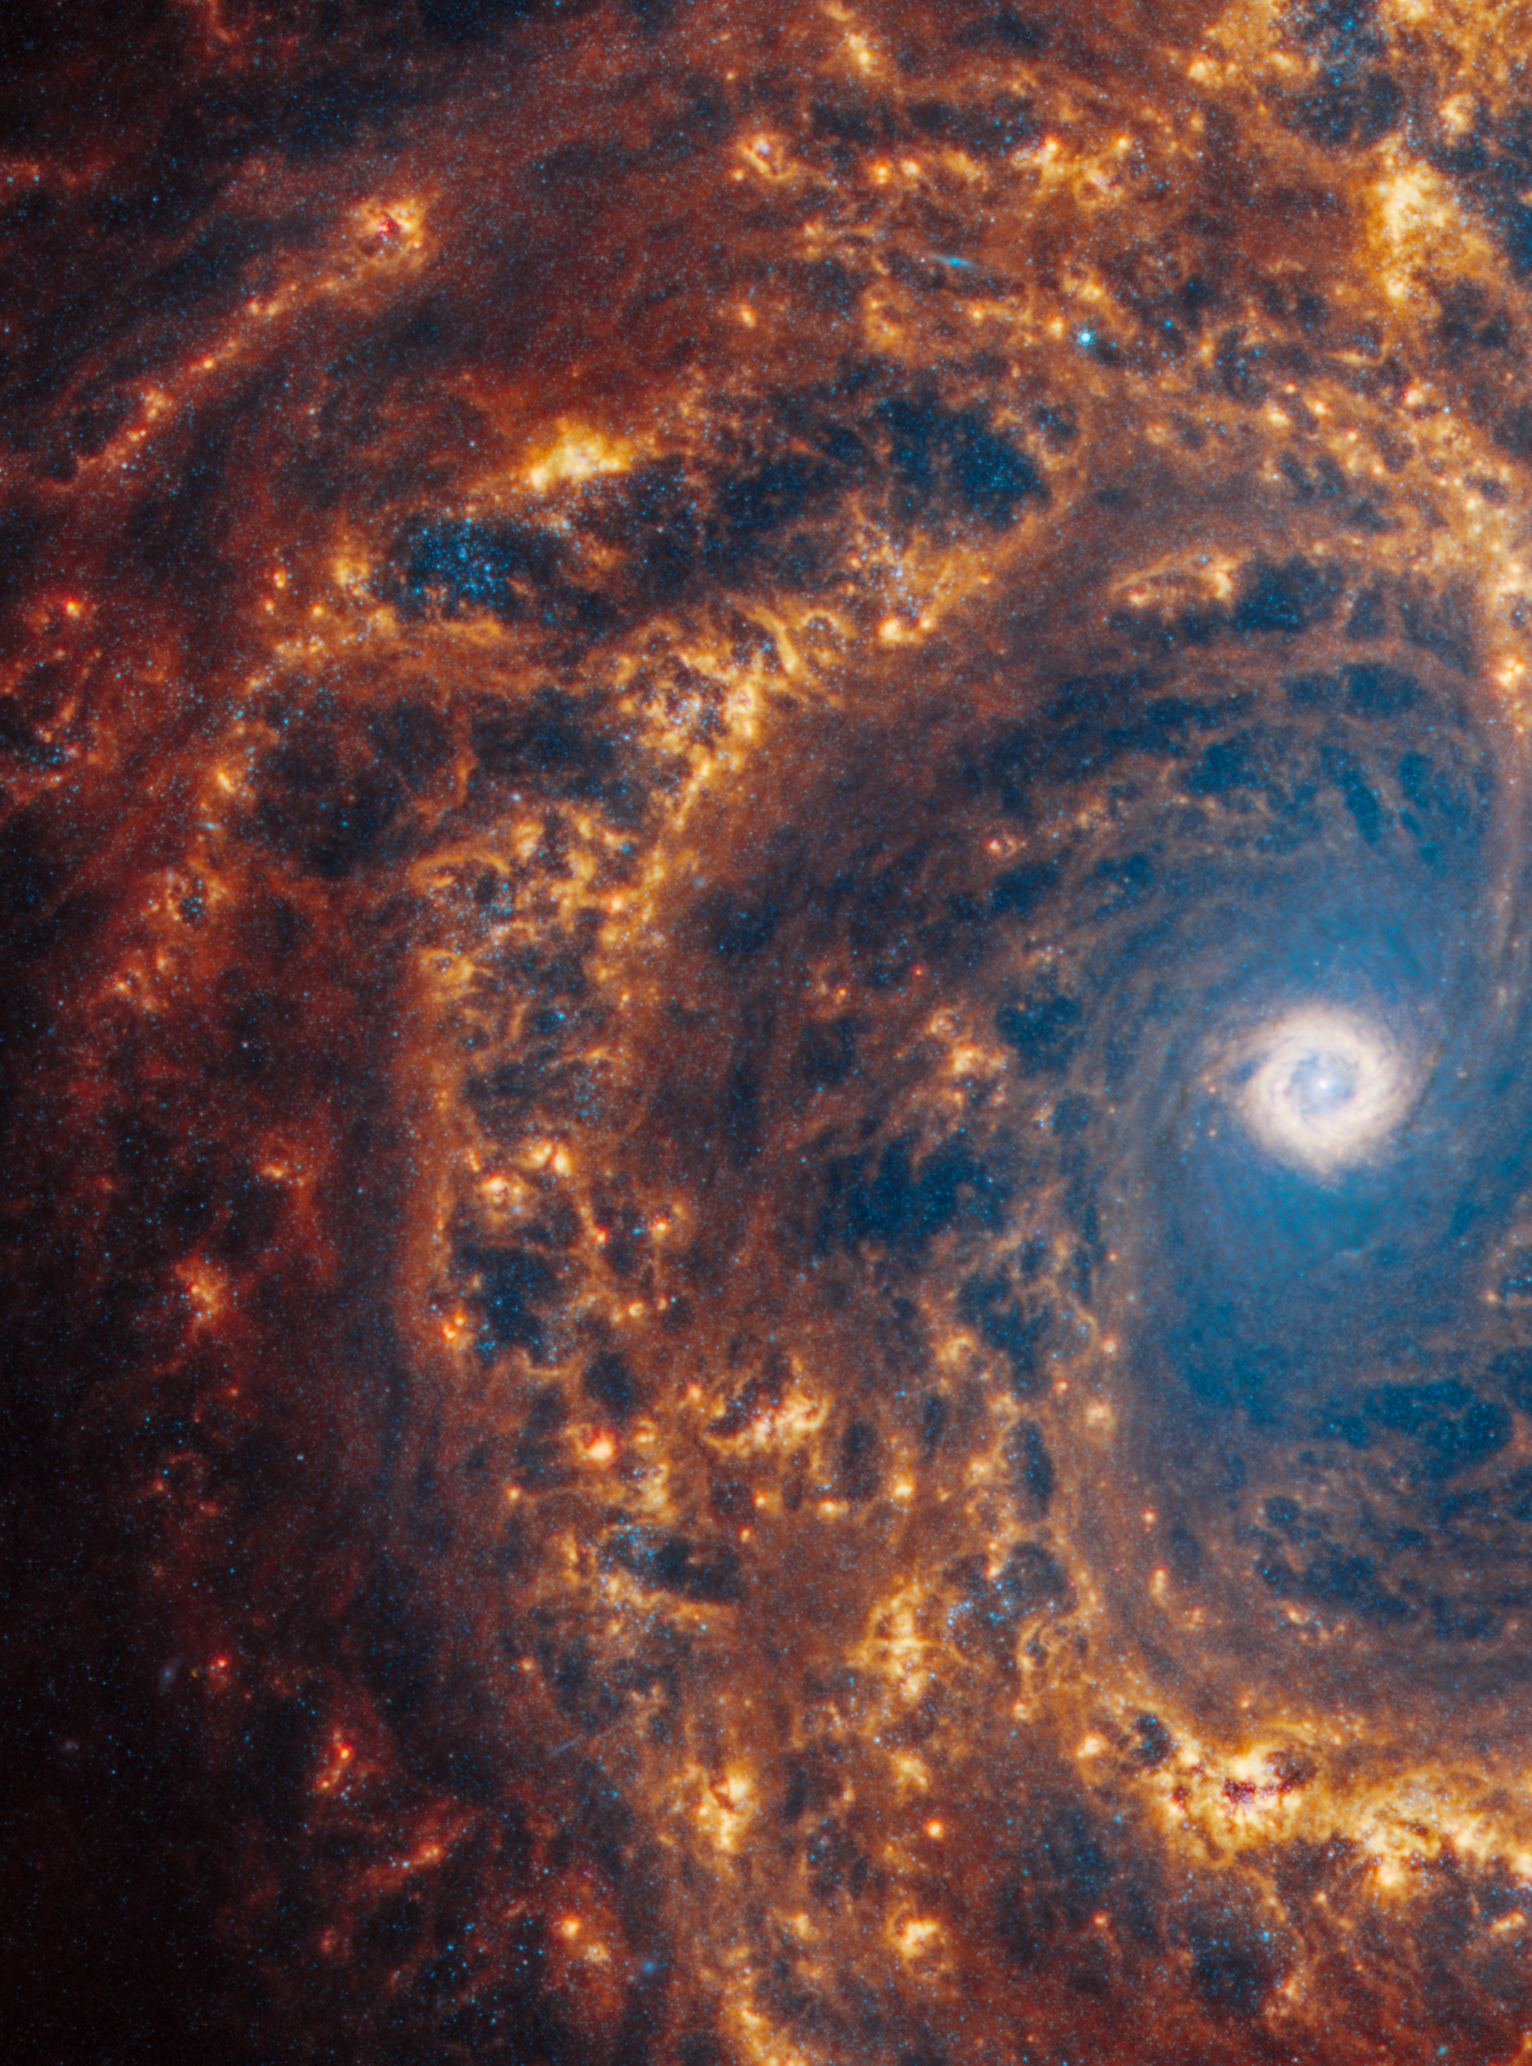

NGC 4303

This spiral galaxy was observed as part of the Physics at High Angular resolution in Nearby GalaxieS (PHANGS) program, a large project that includes observations from several space- and ground-based telescopes of many galaxies to help researchers study all phases of the star formation cycle, from the formation of stars within dusty gas clouds to the energy released in the process that creates the intricate structures revealed by Webb’s new images.

NGC 4303 is 55 million light-years away in the constellation Virgo.

Learn more about what can be seen in this vast collection of Webb images here.

Credit: NASA, ESA, CSA, STScI, J. Lee (STScI), T. Williams (Oxford), PHANGS Team